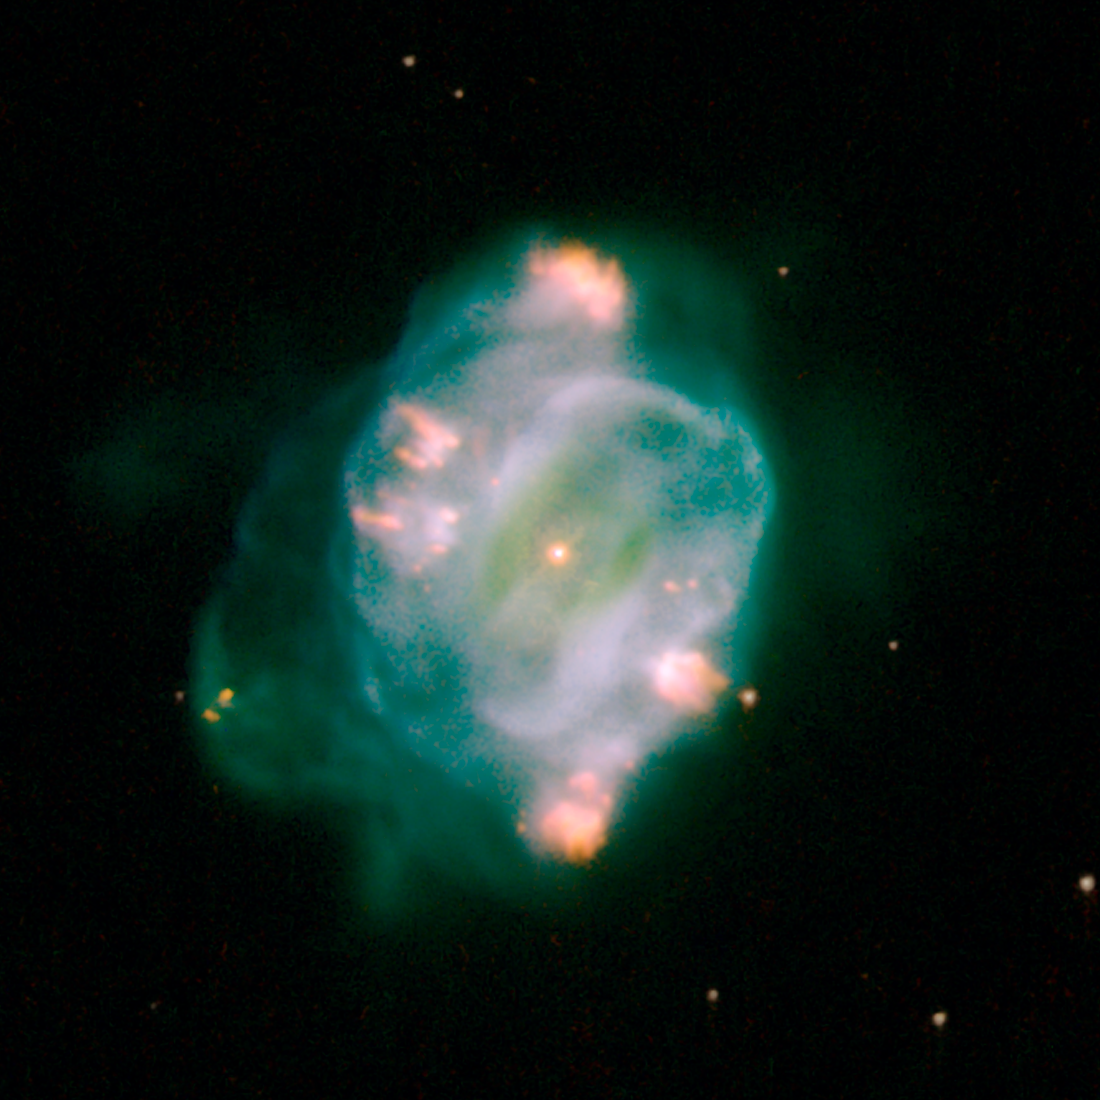

NGC 5307

NGC 5307

Credit: NASA, ESA, and The Hubble Heritage Team (STScI/AURA)